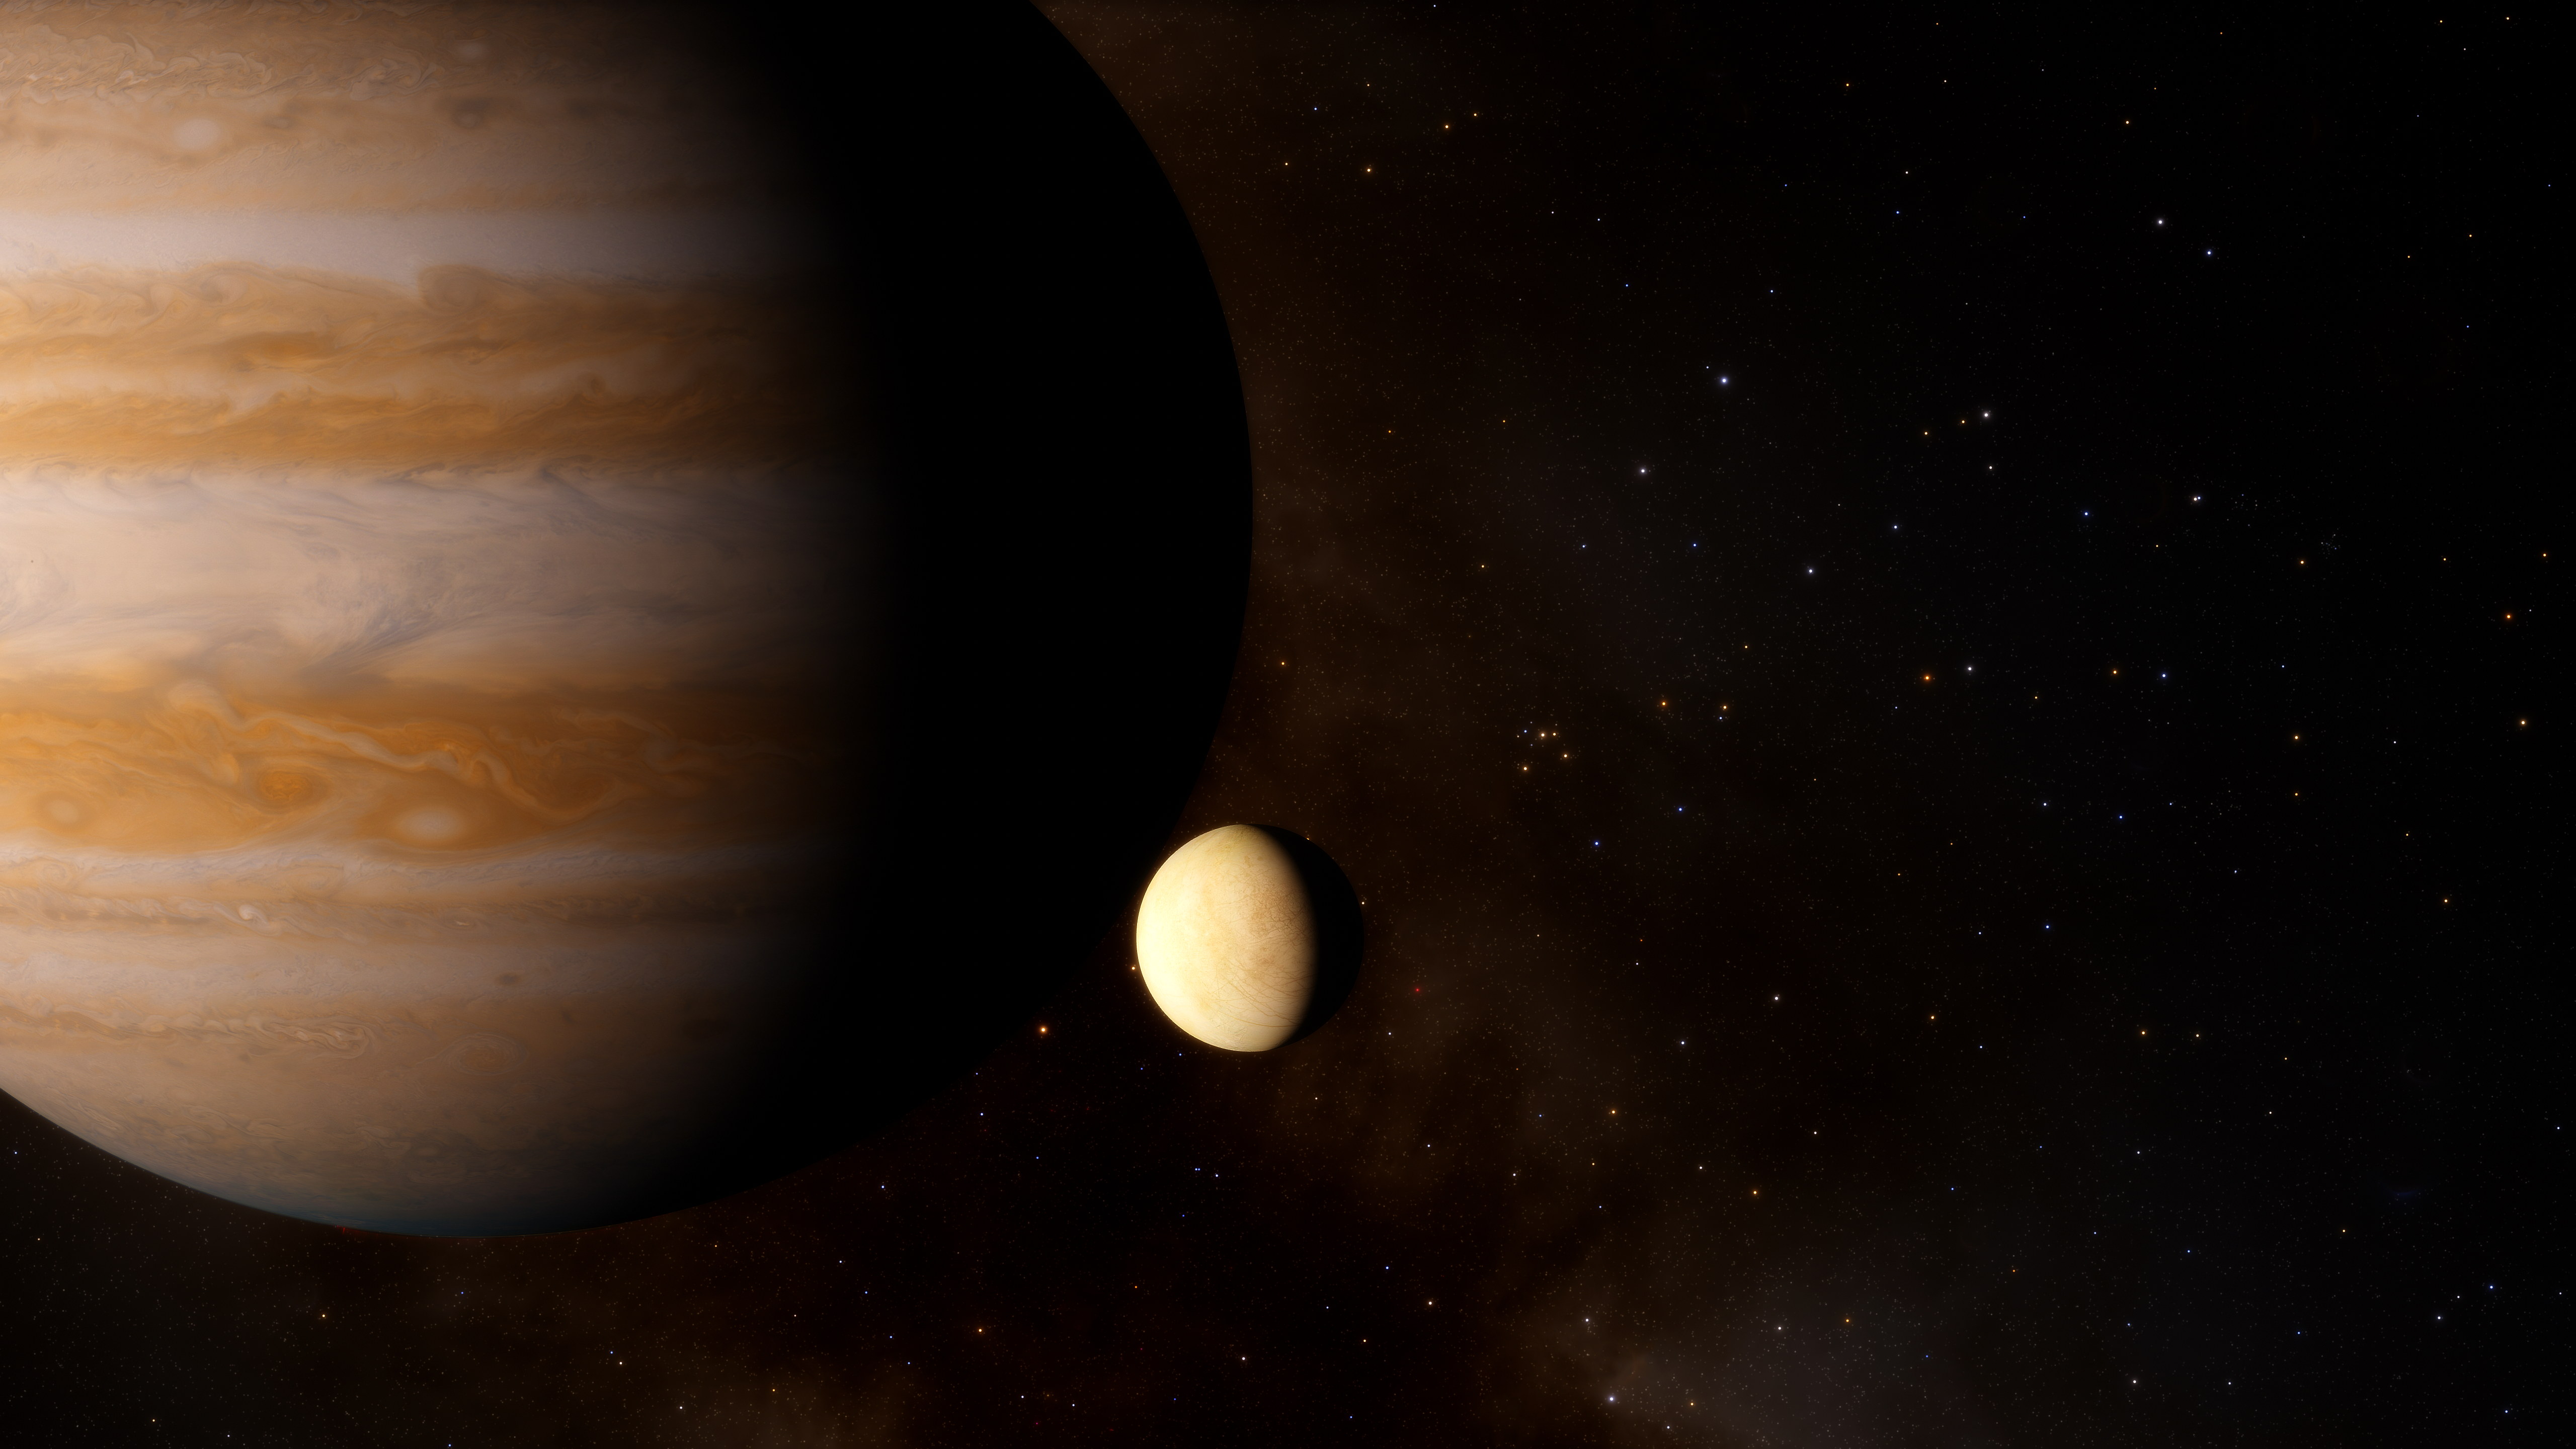

Artist’s Impression of Jupiter and Europa

Observations by the NASA/ESA Hubble Space Telescope recently revealed water vapour in the atmosphere of Ganymede, one of Jupiter’s moons. A new analysis of archival images and spectra has now revealed that water vapour is also present in the atmosphere of Jupter’s icy moon Europa. The analysis found that a water vapour atmosphere is present only on one hemisphere of the moon. This result advances our understanding of the atmospheric structure of icy moons, and helps lay the groundwork for upcoming science missions which will explore Jupiter’s icy moons.

Credit: ESA/Hubble, J. da Silva